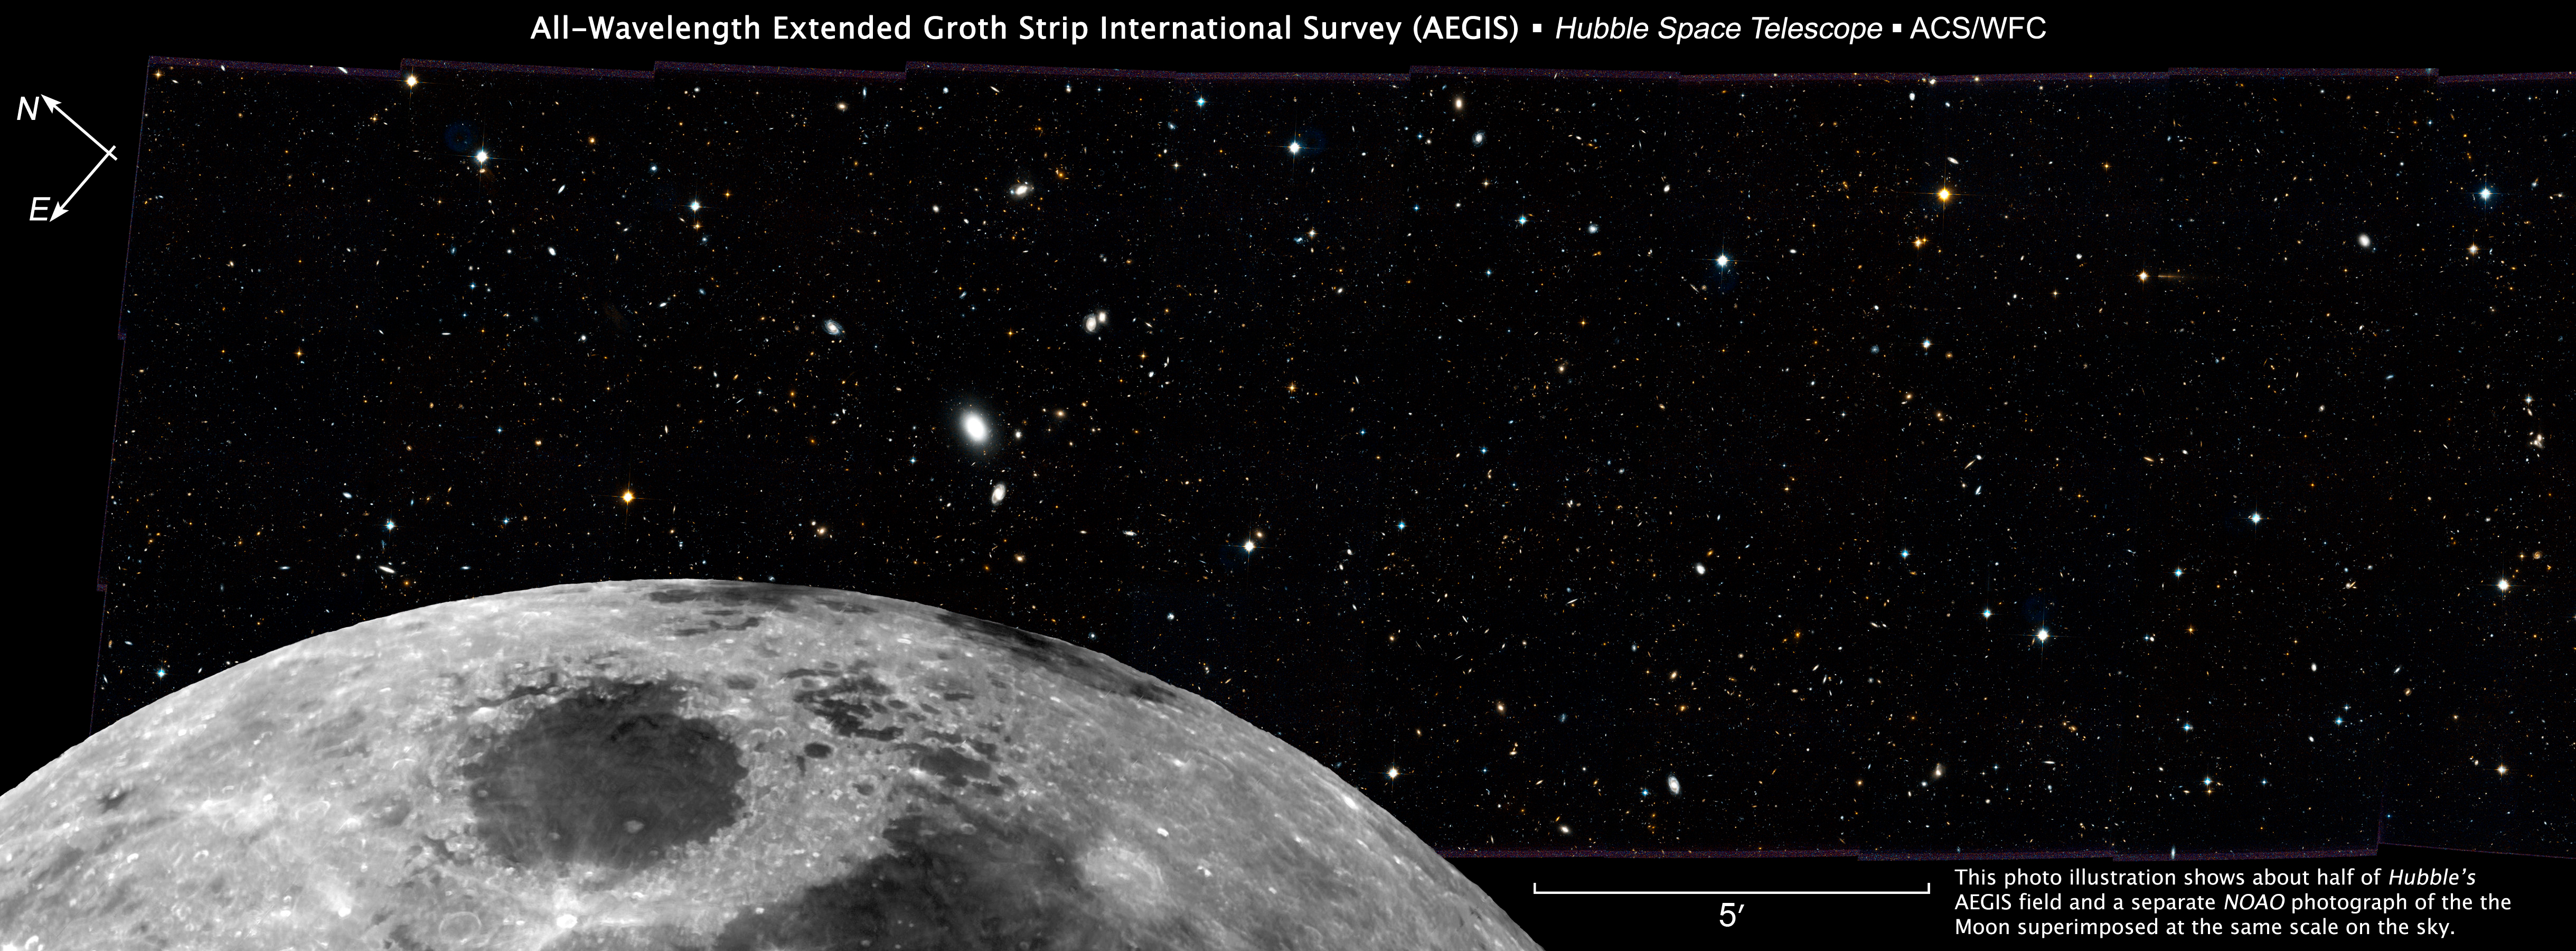

Scale comparison with Moon

Composite image, showing the Moon superimposed over the cosmos, showing about half of Hubble's AEGIS field.

Credit: HST Credit: NASA, ESA, and M. Davis (University of California, Berkeley)Moon Image Credit: T.A.Rector, I.P.Dell'Antonio/NOAO/AURA/NSFIllustration Credit: NASA, ESA, and Z. Levay (STScI)